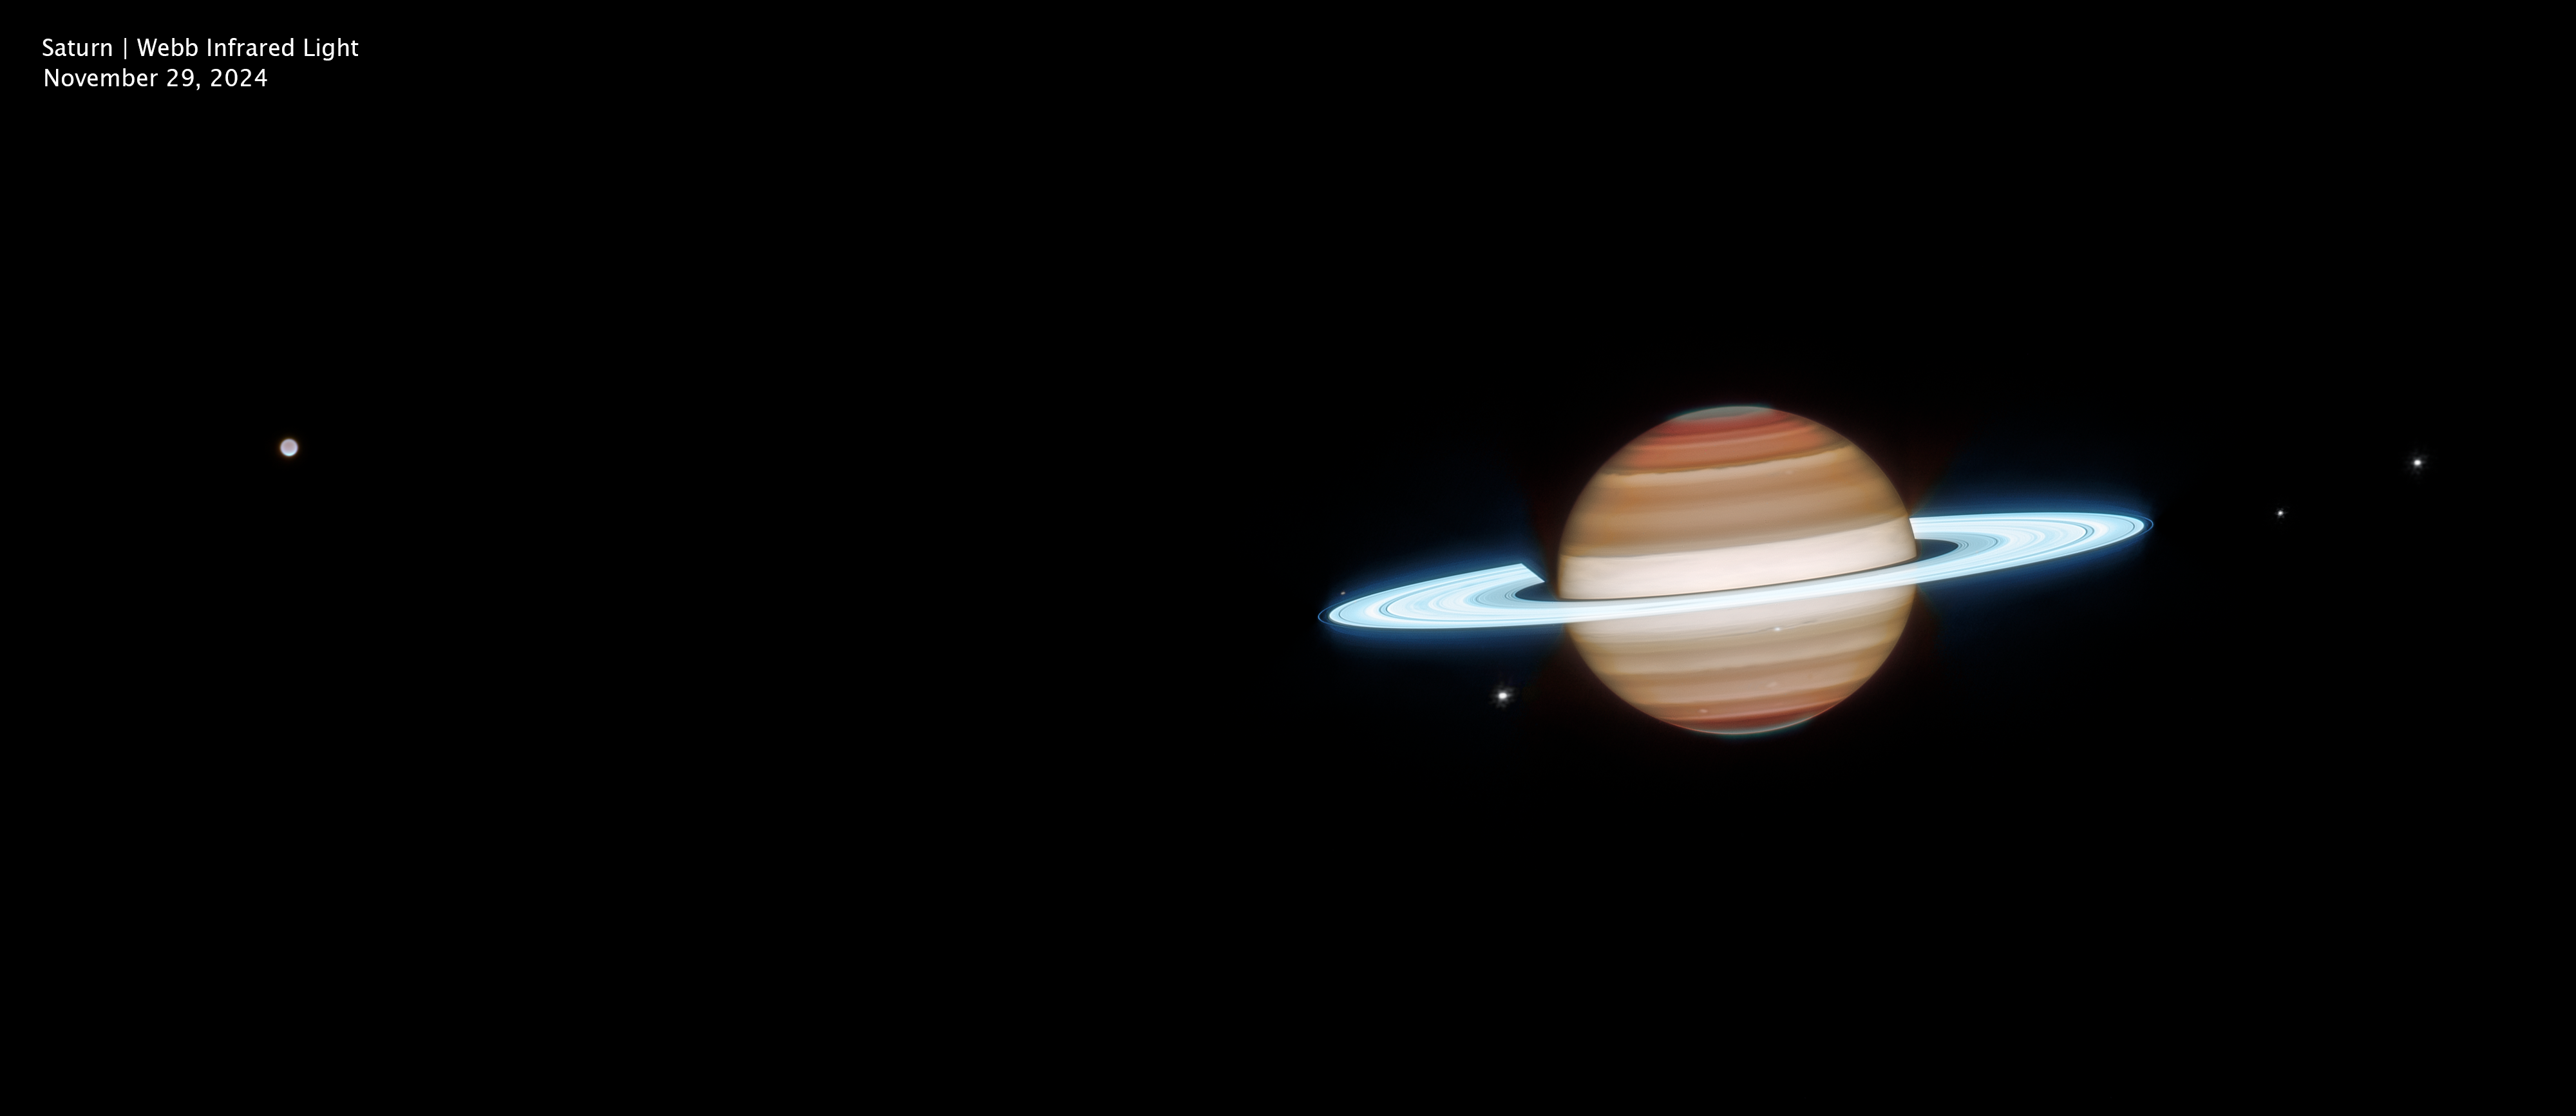

Saturn (Webb image, wide view, clean)

This wider infrared view of Saturn was captured on 29 November 2024 by the NASA/ESA/CSA James Webb Space Telescope. Saturn’s bright rings glow in reflected sunlight, and Webb’s observations reveal structures at different altitudes throughout the planet’s banded atmosphere. Several of Saturn’s larger moons appear across the field of view, including Titan (far left), Janus, Dione, Enceladus, Mimas, and Tethys.

Credit: NASA, ESA, CSA, STScI; Image Processing: J. DePasquale (STScI)